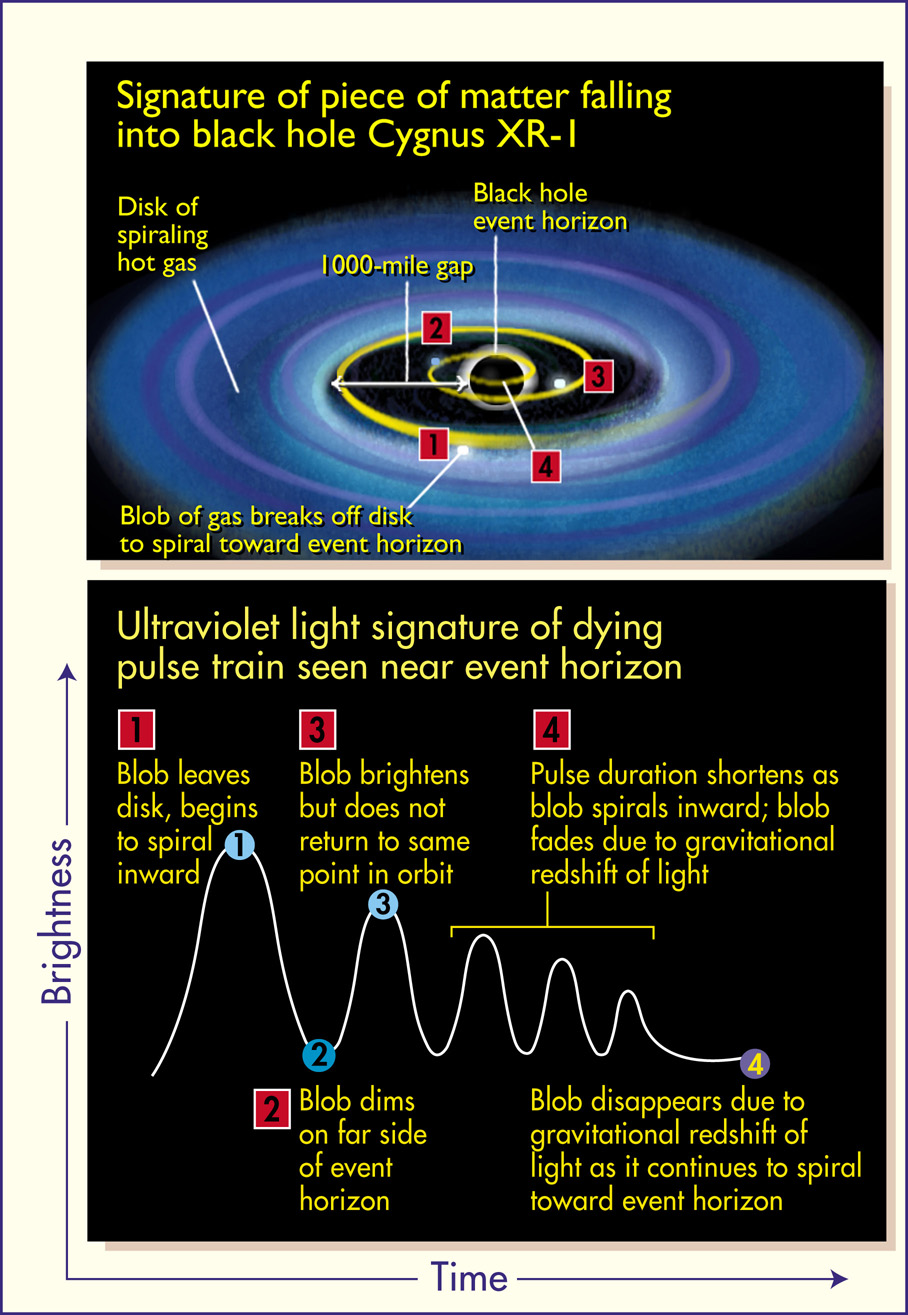

'Death spiral' around Cygnus XR-1

The Hubble telescope may have, for the first time, provided direct evidence for the existence of black holes by observing how matter disappears when it falls beyond the 'event horizon', the boundary between a black hole and the outside universe. Astronomers found their evidence by watching the fading and disappearance of pulses of ultraviolet light from clumps of hot gas swirling around a massive, compact object called Cygnus XR-1. This activity suggests that the hot gas fell into a black hole.

Credit: Ann Feild (STScI)